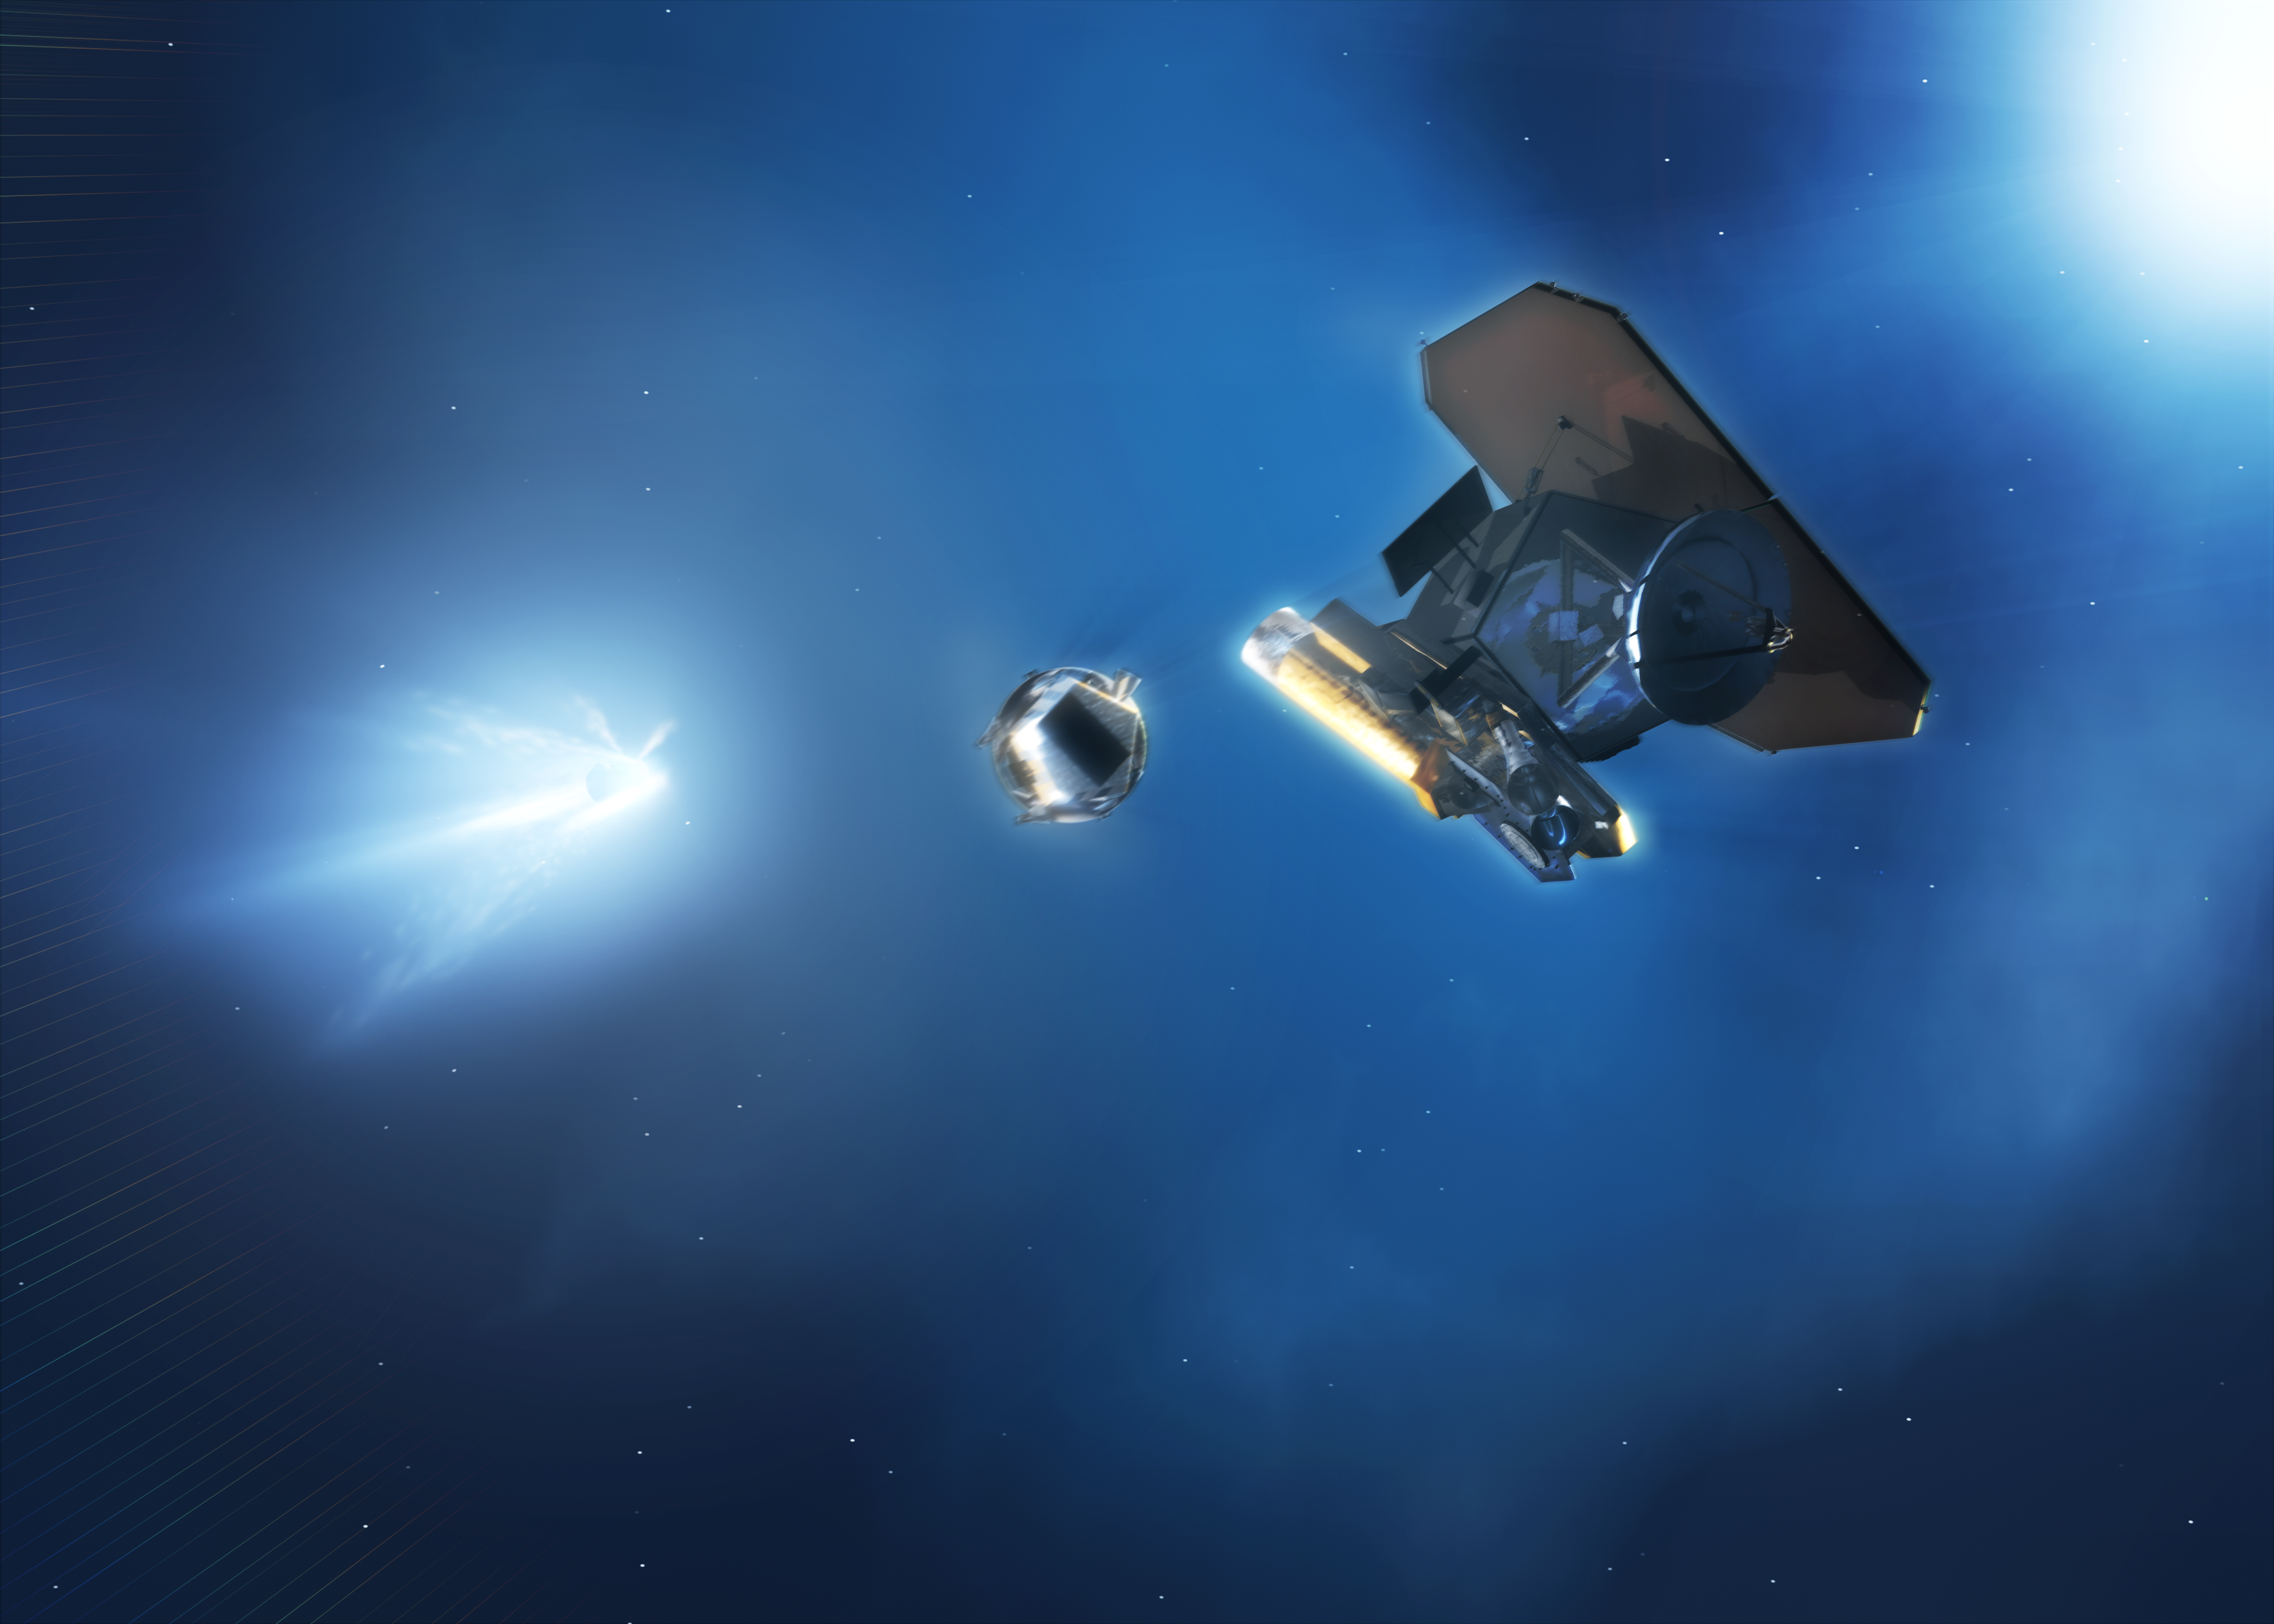

NASA's Deep Impact spacecraft [artist's impression]

Deep Impact spacecraft releases the impactor (artist's impression).

Credit: ESA & NASA